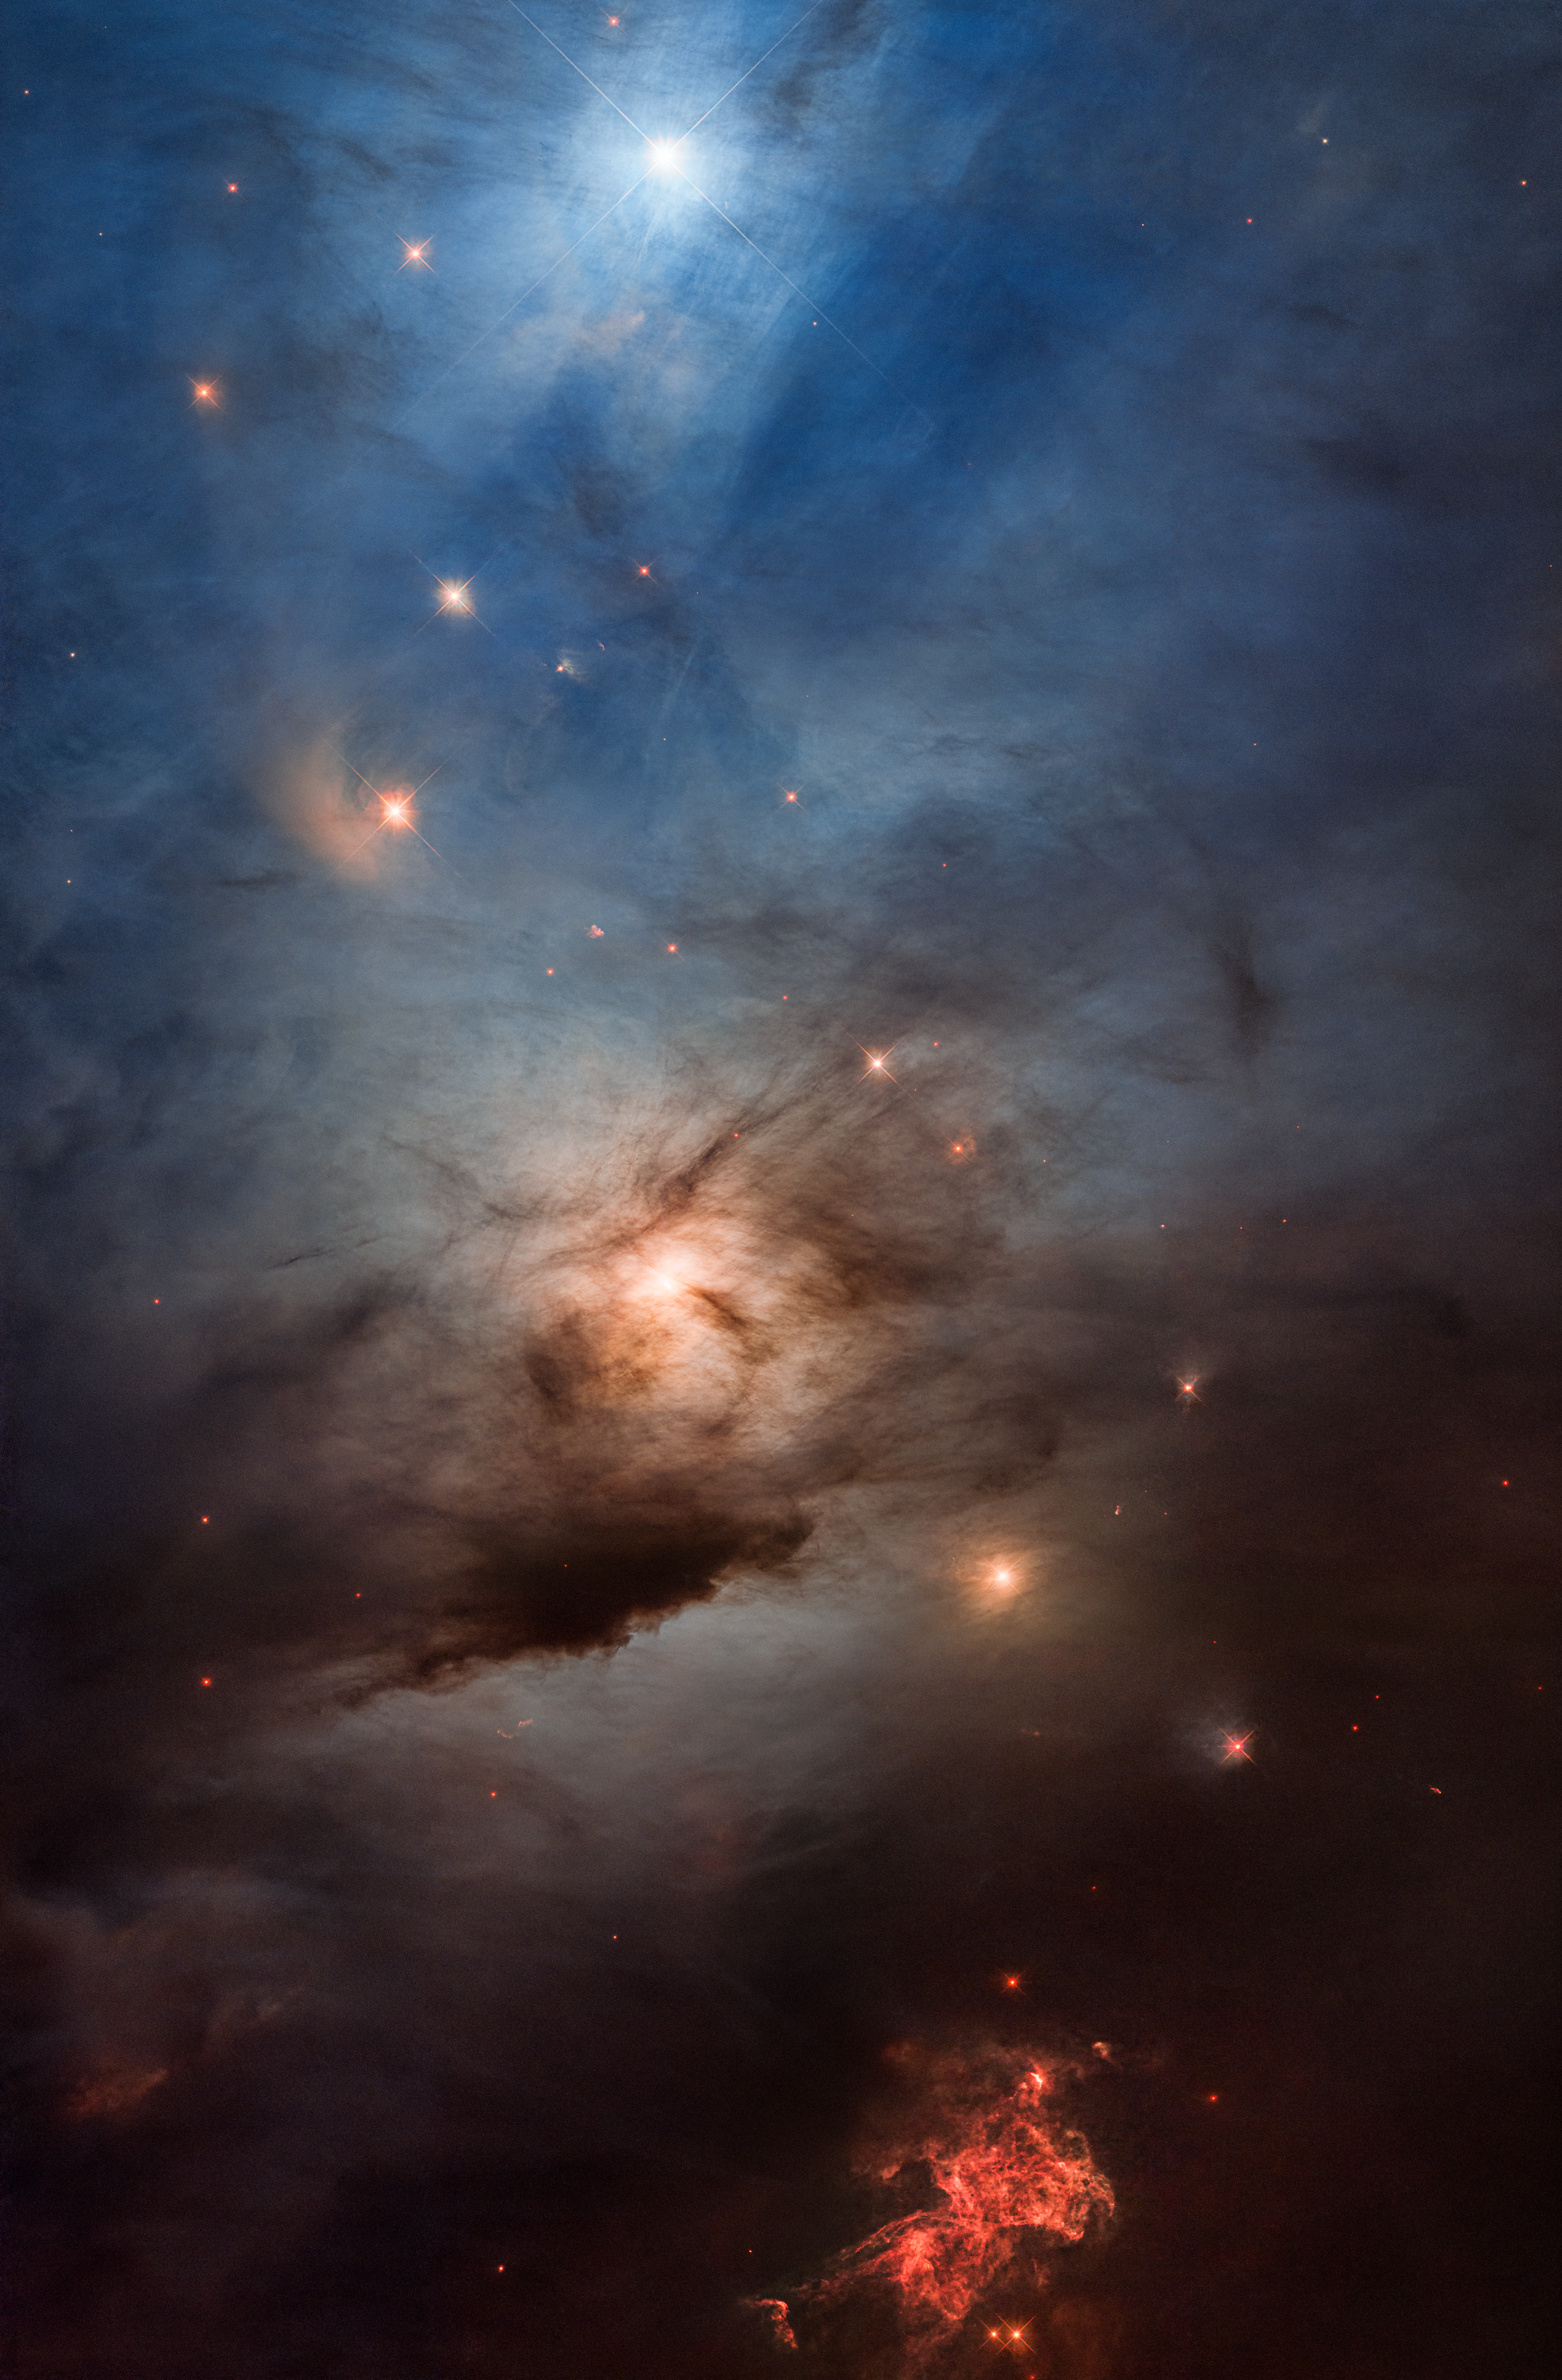

Hubble celebrates its 33rd anniversary with NGC 1333

Astronomers are celebrating the NASA/ESA Hubble Space Telescope’s 33rd launch anniversary with an ethereal photo of a nearby star-forming region, NGC 1333. The nebula is in the Perseus molecular cloud, and is located approximately 960 light-years away.

Hubble’s colourful view, showcasing its unique capability to obtain images in light from ultraviolet to near-infrared, unveils an effervescent cauldron of glowing gases and pitch-black dust stirred up and blown around by several hundred newly forming stars embedded within the dark cloud. Even then, Hubble just scratches the surface; most of the star-birthing firestorm is hidden behind clouds of fine dust — essentially soot — that are thicker toward the bottom of the image. The black areas of the image are not empty space, but are filled with obscuring dust.

To capture this image, Hubble peered through a veil of dust on the edge of a giant cloud of cold molecular hydrogen — the raw material for fabricating new stars and planets under the relentless pull of gravity. The image underscores the fact that star formation is a messy process in a rambunctious Universe.

Ferocious stellar winds, likely from the bright blue star at the top of the image, are blowing through a curtain of dust. The fine dust scatters the starlight at blue wavelengths.

Farther down, another bright super-hot star shines through filaments of obscuring dust, looking like the Sun shining through scattered clouds. A diagonal string of fainter accompanying stars looks reddish because the dust is filtering their starlight, allowing more of the red light to get through.

The bottom of the picture presents a keyhole peek deep into the dark nebula. Hubble captures the reddish glow of ionised hydrogen. It looks like the finale of a fireworks display, with several overlapping events. This is caused by pencil-thin jets shooting out from newly forming stars outside the frame of view. These stars are surrounded by circumstellar discs, which may eventually produce planetary systems, and powerful magnetic fields that direct two parallel beams of hot gas deep into space, like a double lightsaber from science fiction films. They sculpt patterns on the hydrogen cocoon, like laser lightshow tracings. The jets are a star’s birth announcement.

This view offers an example of the time when our own Sun and planets formed inside such a dusty molecular cloud, 4.6 billion years ago. Our Sun didn’t form in isolation but was instead embedded inside a mosh pit of frantic stellar birth, perhaps even more energetic and massive than NGC 1333.

Credit: NASA, ESA, STScI